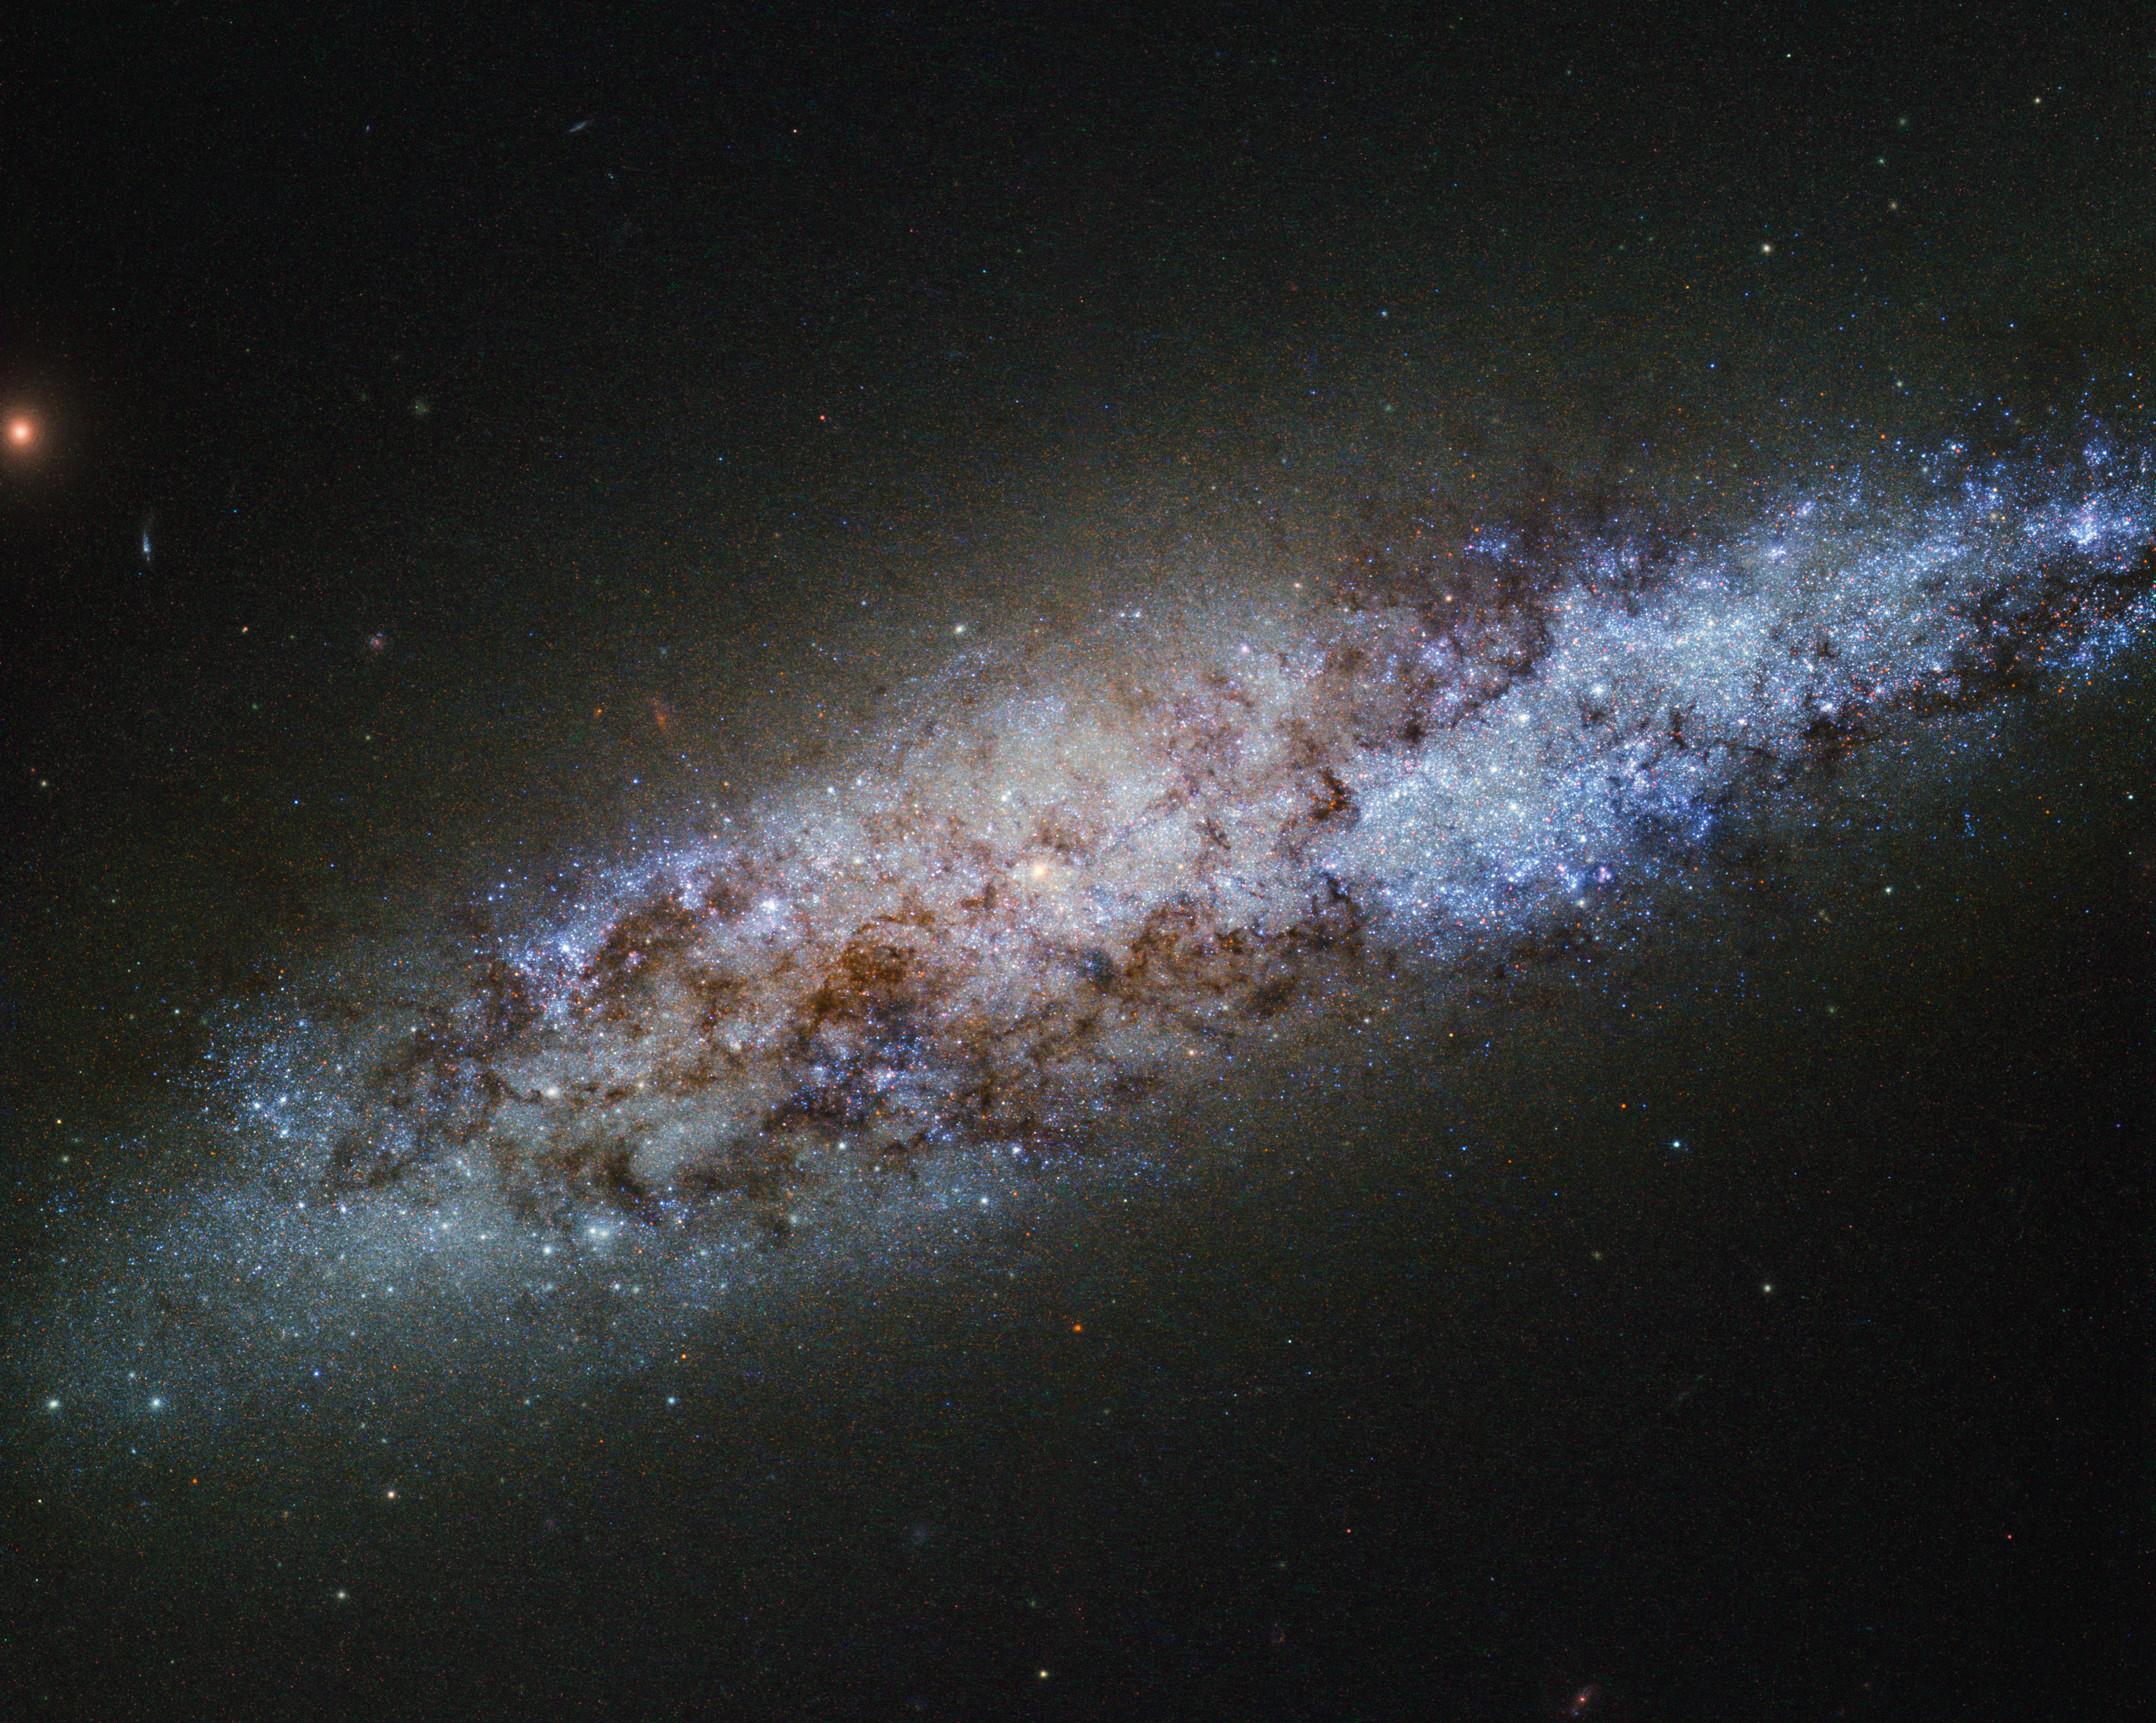

The scale of the Universe

This bundle of bright stars and dark dust is a dwarf spiral galaxy known as NGC 4605, located around 16 million light-years away in the constellation of Ursa Major (The Great Bear). This galaxy’s spiral structure is not obvious from this image, but NGC 4605 is classified as an SBc type galaxy — meaning that it has sprawling, loosely wound arms and a bright bar of stars cutting through its centre.

NGC 4605 is a member of the Messier 81 group of galaxies, a gathering of bright galaxies including its namesake Messier 81 (heic0710), and the well-known Messier 82 (heic0604a). Galaxy groups like this usually contain around 50 galaxies, all loosely bound together by gravity. This group is famous for its unusual members, many of which formed from collisions between galaxies. With its somewhat unusual form, NGC 4605 fits in well with the family of perturbed galaxies in the M81 group, although the origin of its abnormal features is not yet clear.

The Messier 81 group is one of the nearest groups to our own, the Local Group, which houses the Milky Way and some of its well-known neighbours, including the Andromeda Galaxy and the Magellanic Clouds. Galaxy groups provide environments where galaxies can evolve through interactions like collisions and mergers. These galaxy groups are then lumped together into even larger gatherings of galaxies known as clusters and superclusters. The Local and Messier 81 groups both belong to the Virgo Supercluster, a large and massive collection of some 100 galaxy groups and clusters.

With so many galaxies swarming around, NGC 4605 may seem unremarkable. However, astronomers are using this galaxy to test our knowledge of stellar evolution. The newly-formed stars in NGC 4605 are being used to investigate how interactions between galaxies affect the formation, evolution, and behaviour of the stars within, how bright stellar nurseries come together to form stellar clusters and stellar associations, and how these stars evolve over time.

And that's not all — NGC 4605 is also proving to be a good testing ground for dark matter. Our theories on this hypothetical type of matter have had good success at describing how the Universe looks and behaves on a large scale — for example at the galaxy supercluster level — but when looking at individual galaxies, they have run into problems. Observations of NGC 4605 show that the way in which dark matter is spread throughout its halo is not quite as these models predict. While intriguing, observations in this area are still inconclusive, leaving astronomers to ponder over the contents of the Universe.

Credit: ESA/Hubble & NASA Acknowledgement: D. Calzetti (University of Massachusetts) and the LEGUS Team